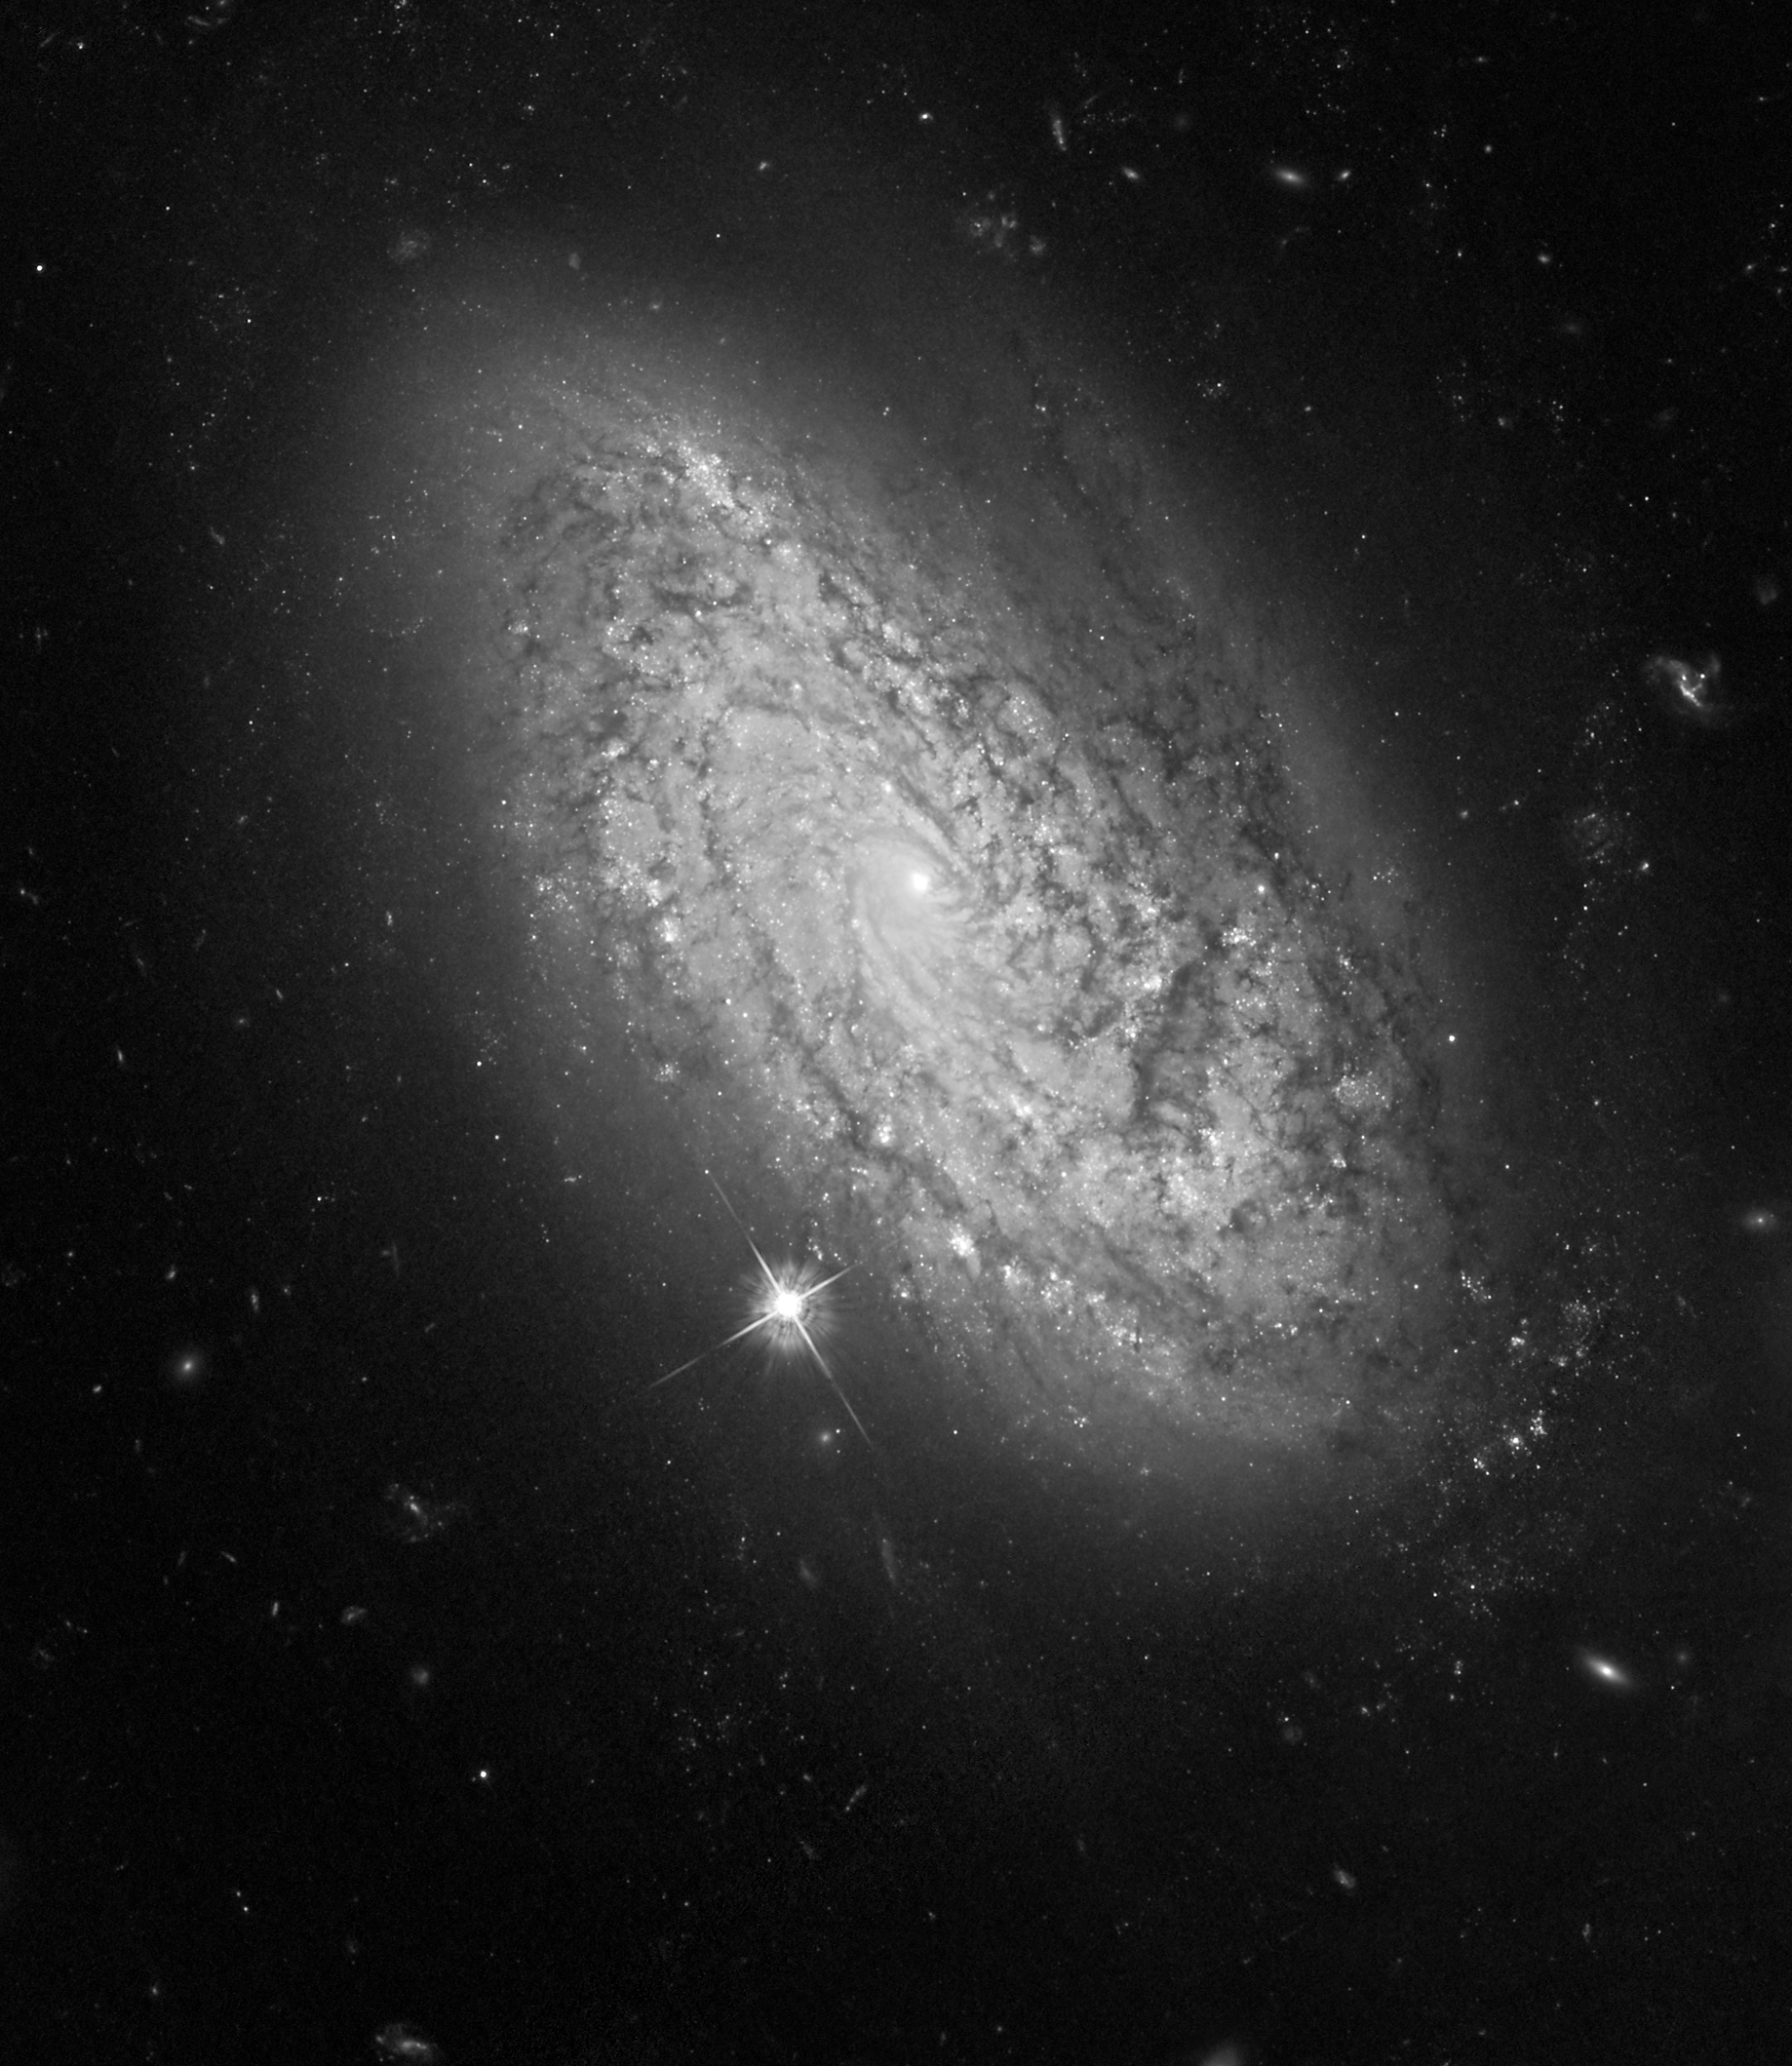

HST ACS/WFC image of NGC 3021

This is a NASA/ESA Hubble Space Telescope photo of the spiral galaxy NGC 3021. This was one of several hosts of recent Type Ia supernovae observed by astronomers to refine the measure of the universe's expansion rate, called the Hubble constant.

Credit: NASA, ESA and A. Riess (STScI/JHU)